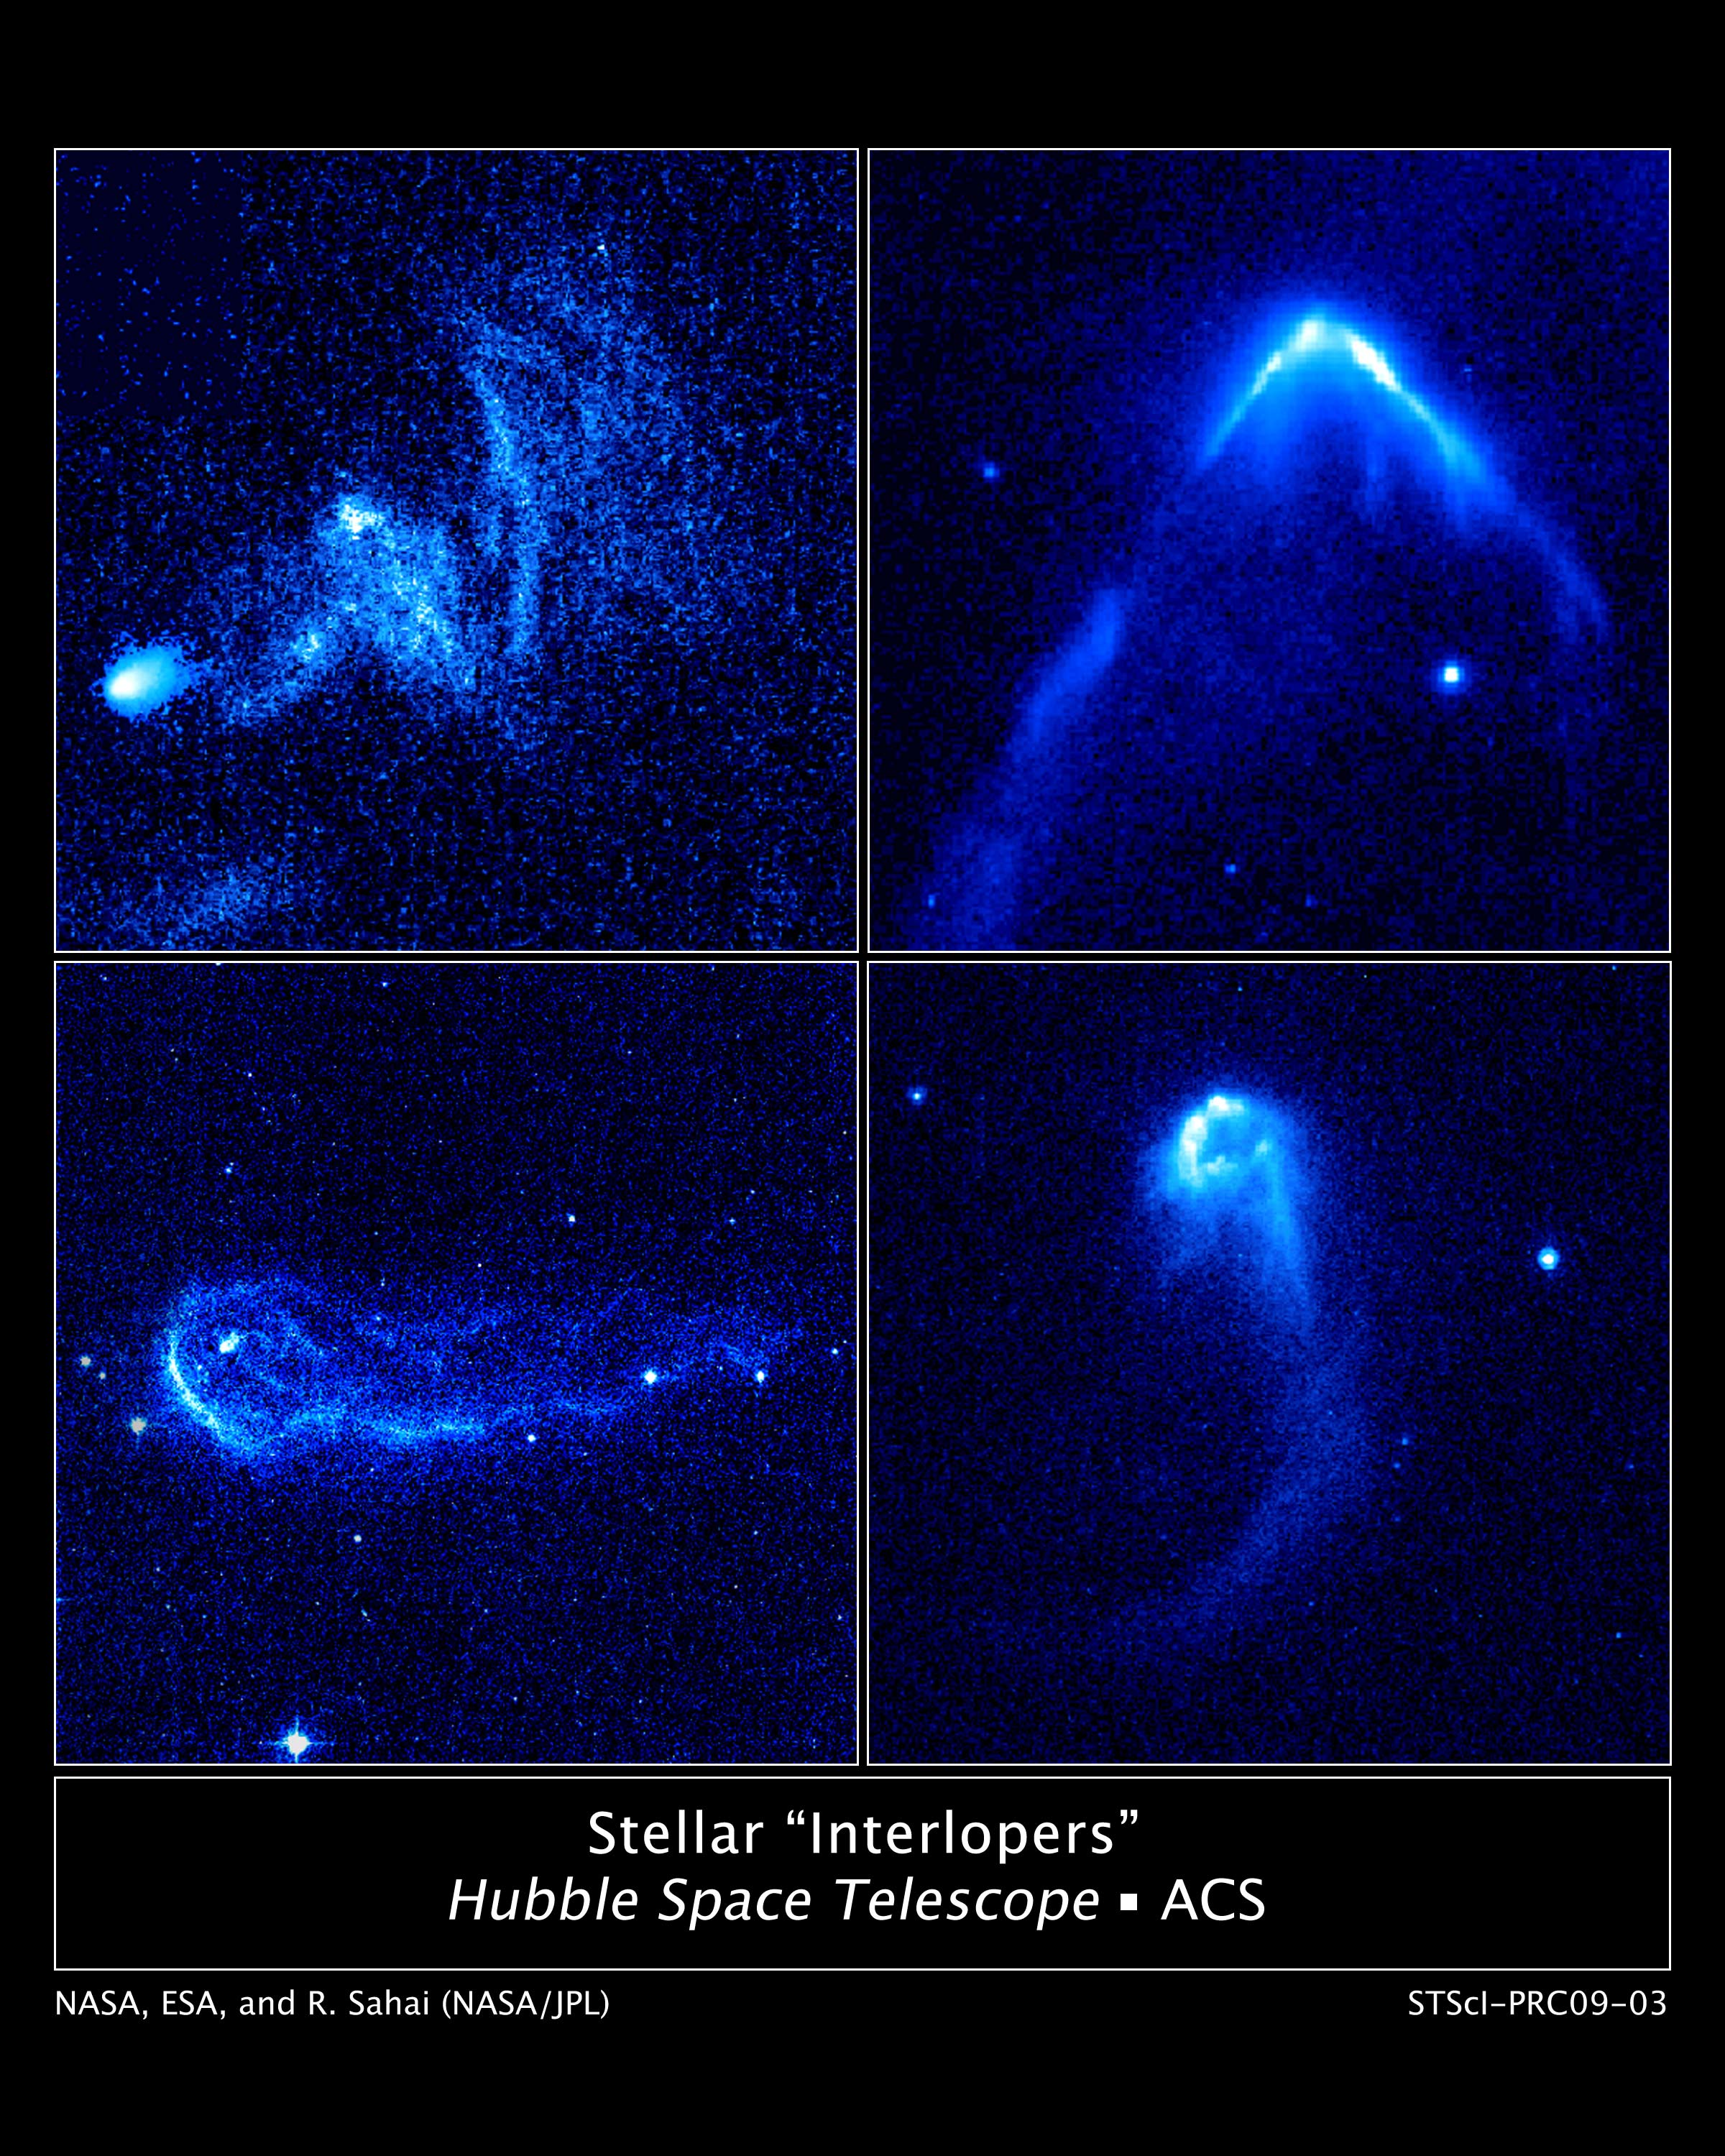

Stellar interlopers caught speeding through space

Resembling comets streaking across the sky, these four speedy stars are plowing through regions of dense interstellar gas and creating brilliant arrowhead structures and trailing tails of glowing gas.

These bright arrowheads, or bow shocks, can be seen in these four images taken with NASA/ESA Hubble Space Telescope. The bow shocks form when the stars' powerful stellar winds, streams of matter flowing from the stars, slam into surrounding dense gas. The phenomenon is similar to that seen when a speeding boat pushes through water on a lake.

Credit: NASA, ESA and R. Sahai (NASA's Jet Propulsion Laboratory)